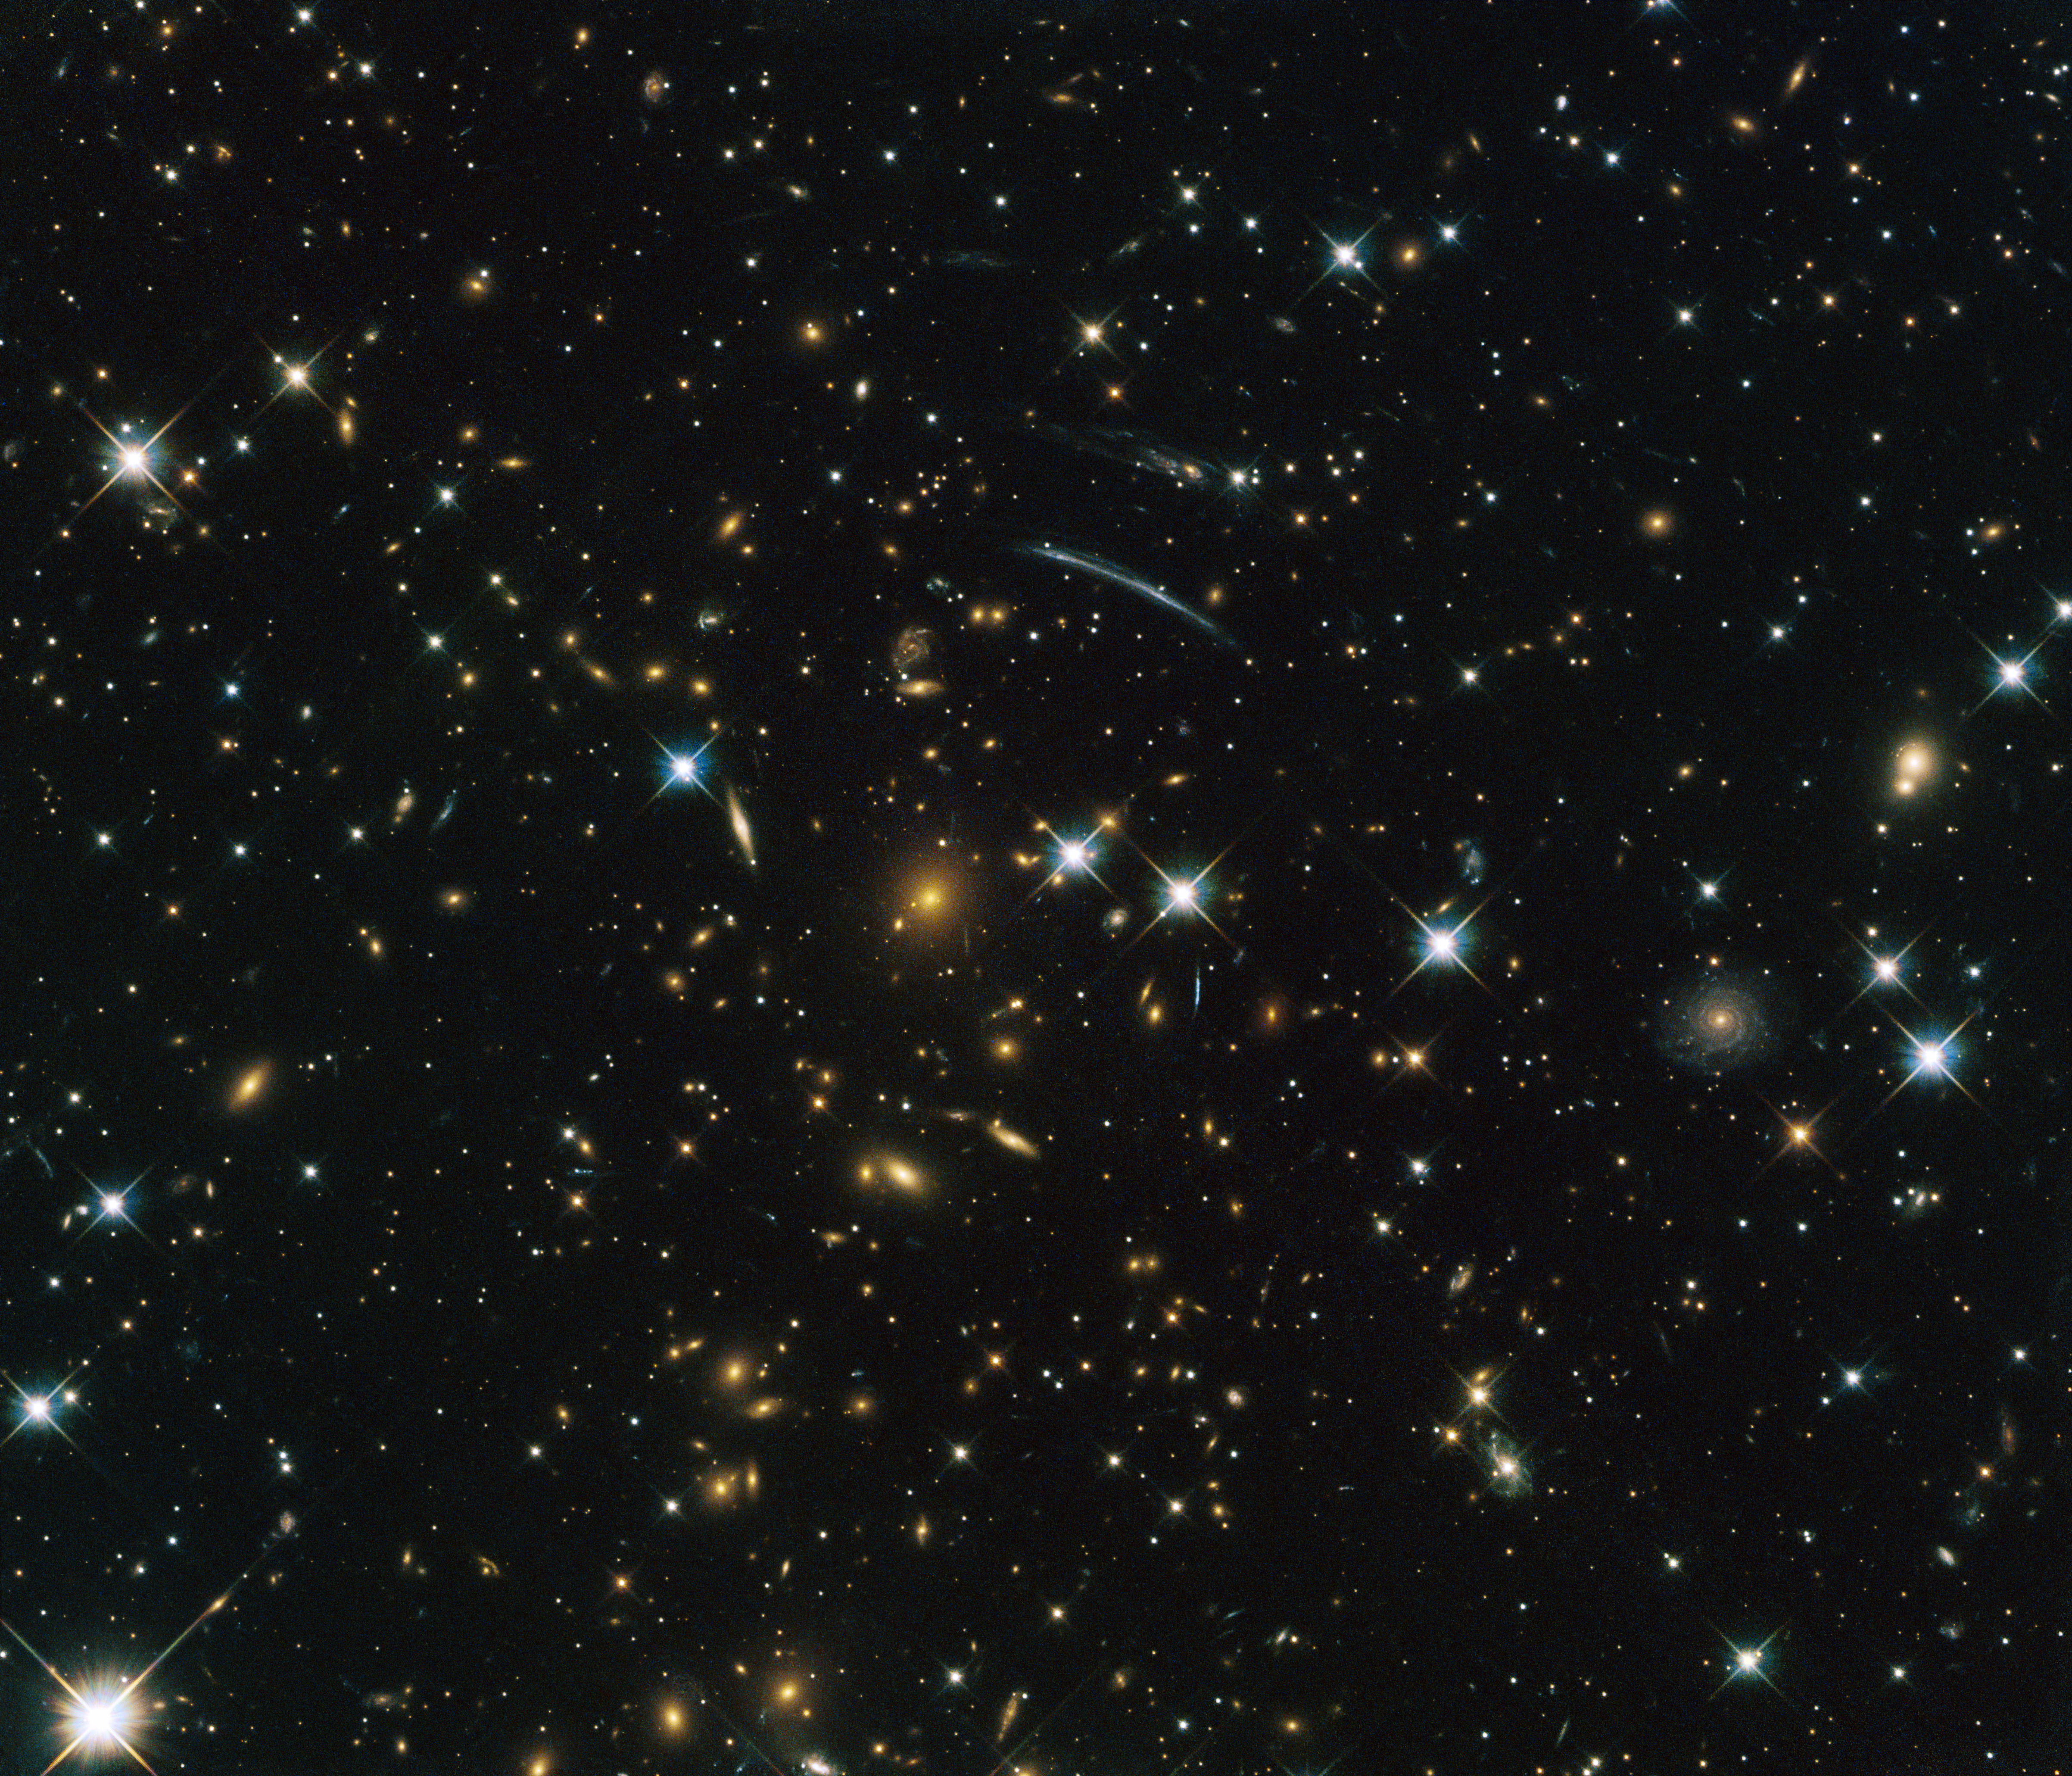

A window into the cosmic past

This image from the NASA/ESA Hubble Space Telescope shows the galaxy cluster PLCK G004.5-19.5. It was discovered by the ESA Planck satellite through the Sunyaev-Zel’dovich effect — the distortion of the cosmic microwave background radiation in the direction of the galaxy cluster, by high energy electrons in the intracluster gas. The large galaxy at the centre is the brightest galaxy in the cluster and the dominant object in this image, and above it a thin, curved gravitational lens arc is visible. This is caused by the gravitational forces of the cluster bending the light from stars and galaxies behind it, in a similar way to how a glass lens bends light.

Several stars are visible in front of the cluster — recognisable by their diffraction spikes — but aside from these, all other visible objects are distant galaxies. Their light has become redshifted by the expansion of space, making them appear redder than they actually are. By measuring the amount of redshift, we know that it took more than 5 billion years for the light from this galaxy cluster to reach us. The light of the galaxies in the background had to travel for even longer than that, making this image an extremely old window into the far reaches of the Universe.

This image was taken by Hubble’s Advanced Camera for Surveys (ACS) and Wide-Field Camera 3 (WFC3) as part of an observing programme called RELICS (Reionization Lensing Cluster Survey). RELICS imaged 41 massive galaxy clusters with the aim of finding the brightest distant galaxies for the forthcoming NASA/ESA/CSA James Webb Space Telescope (JWST) to study.

Acknowledgement: D. Coe et al.

Credit: ESA/Hubble & NASA, RELICS